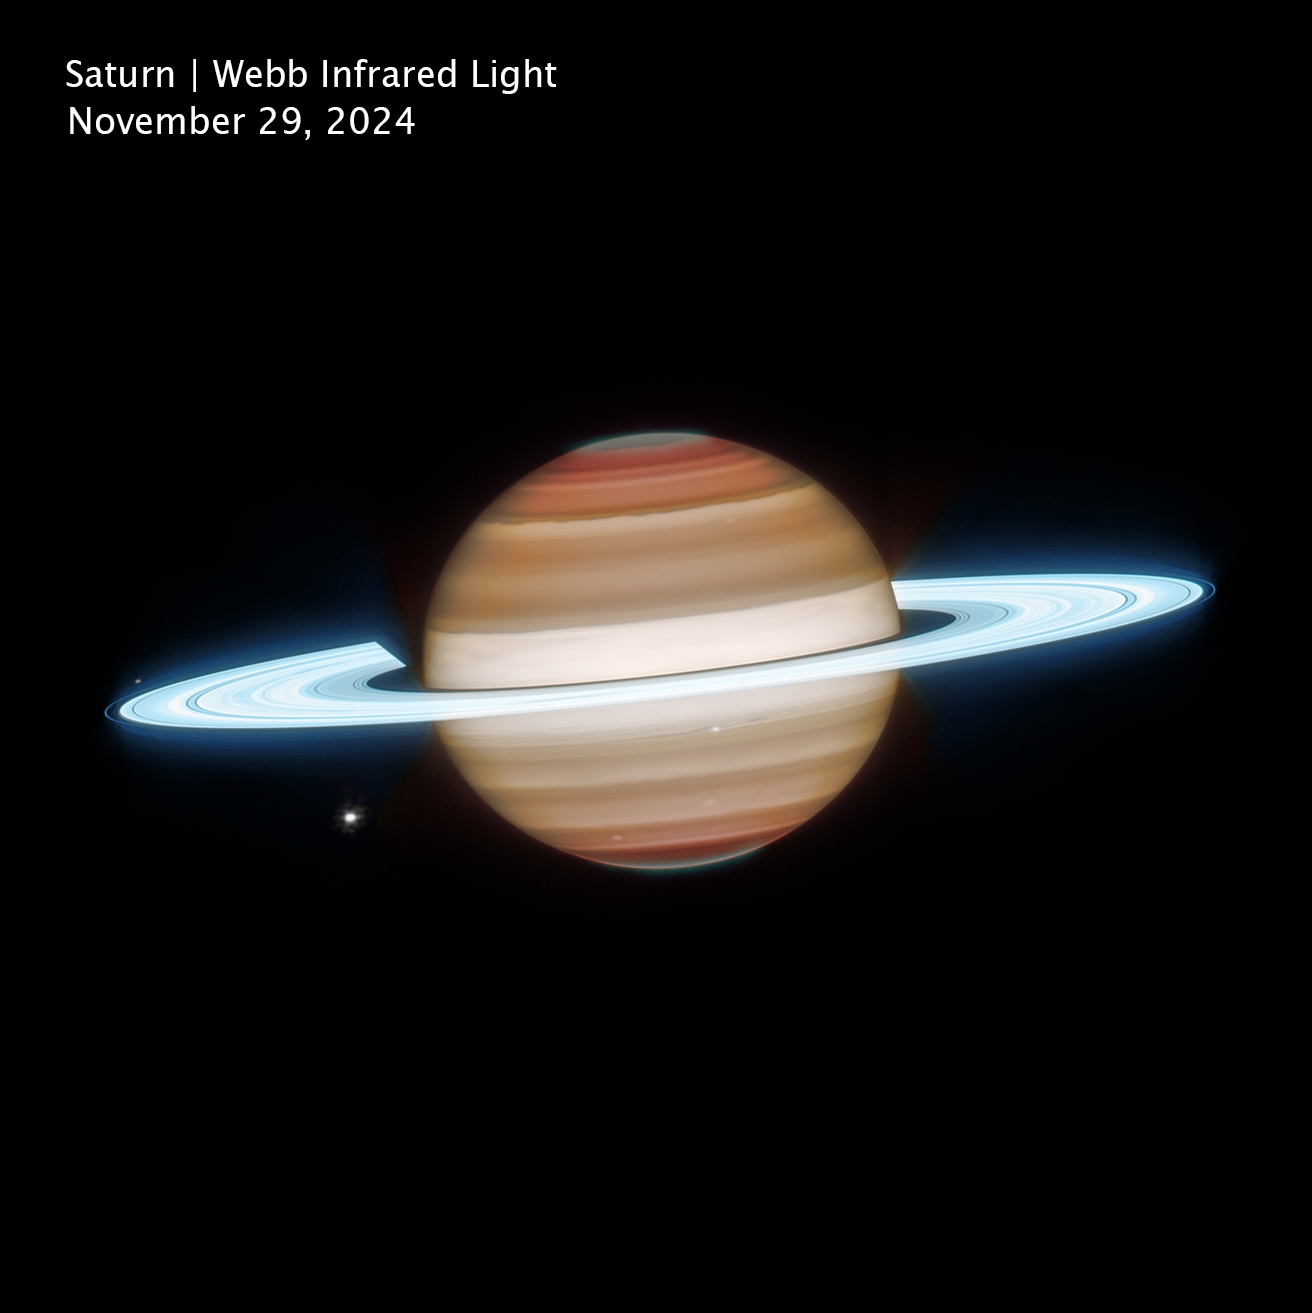

Saturn (Webb image, cropped and clean)

This infrared view of Saturn was captured on 29 November 2024, by the NASA/ESA/CSA James Webb Space Telescope. Observing the planet in infrared wavelengths allows Webb to reveal details of Saturn’s atmosphere and rings that can’t be seen in visible light. In this view, Saturn’s rings appear exceptionally bright because they are composed largely of highly reflective water-ice particles that efficiently scatter sunlight.

Infrared observations also highlight structure in Saturn’s atmosphere, including broad cloud bands and subtle variations caused by temperature differences, winds, and high-altitude hazes. Webb’s sensitivity to infrared light allows scientists to probe different layers of the atmosphere, helping researchers study how gases, clouds, and aerosols interact across multiple altitudes. These observations provide new insight into the planet’s complex weather patterns and atmospheric dynamics.

Several of Saturn’s moons are visible in this image. Janus appears near the rings to the left of the planet, while Dione is visible below as a bright point of light. Close to the centre of the image, Enceladus appears near the rings. Enceladus is of particular scientific interest because it harbors a global subsurface ocean beneath its icy crust and ejects plumes of water vapor and ice grains into space from fractures near its south pole.

Credit: NASA, ESA, CSA, STScI; Image Processing: J. DePasquale (STScI)